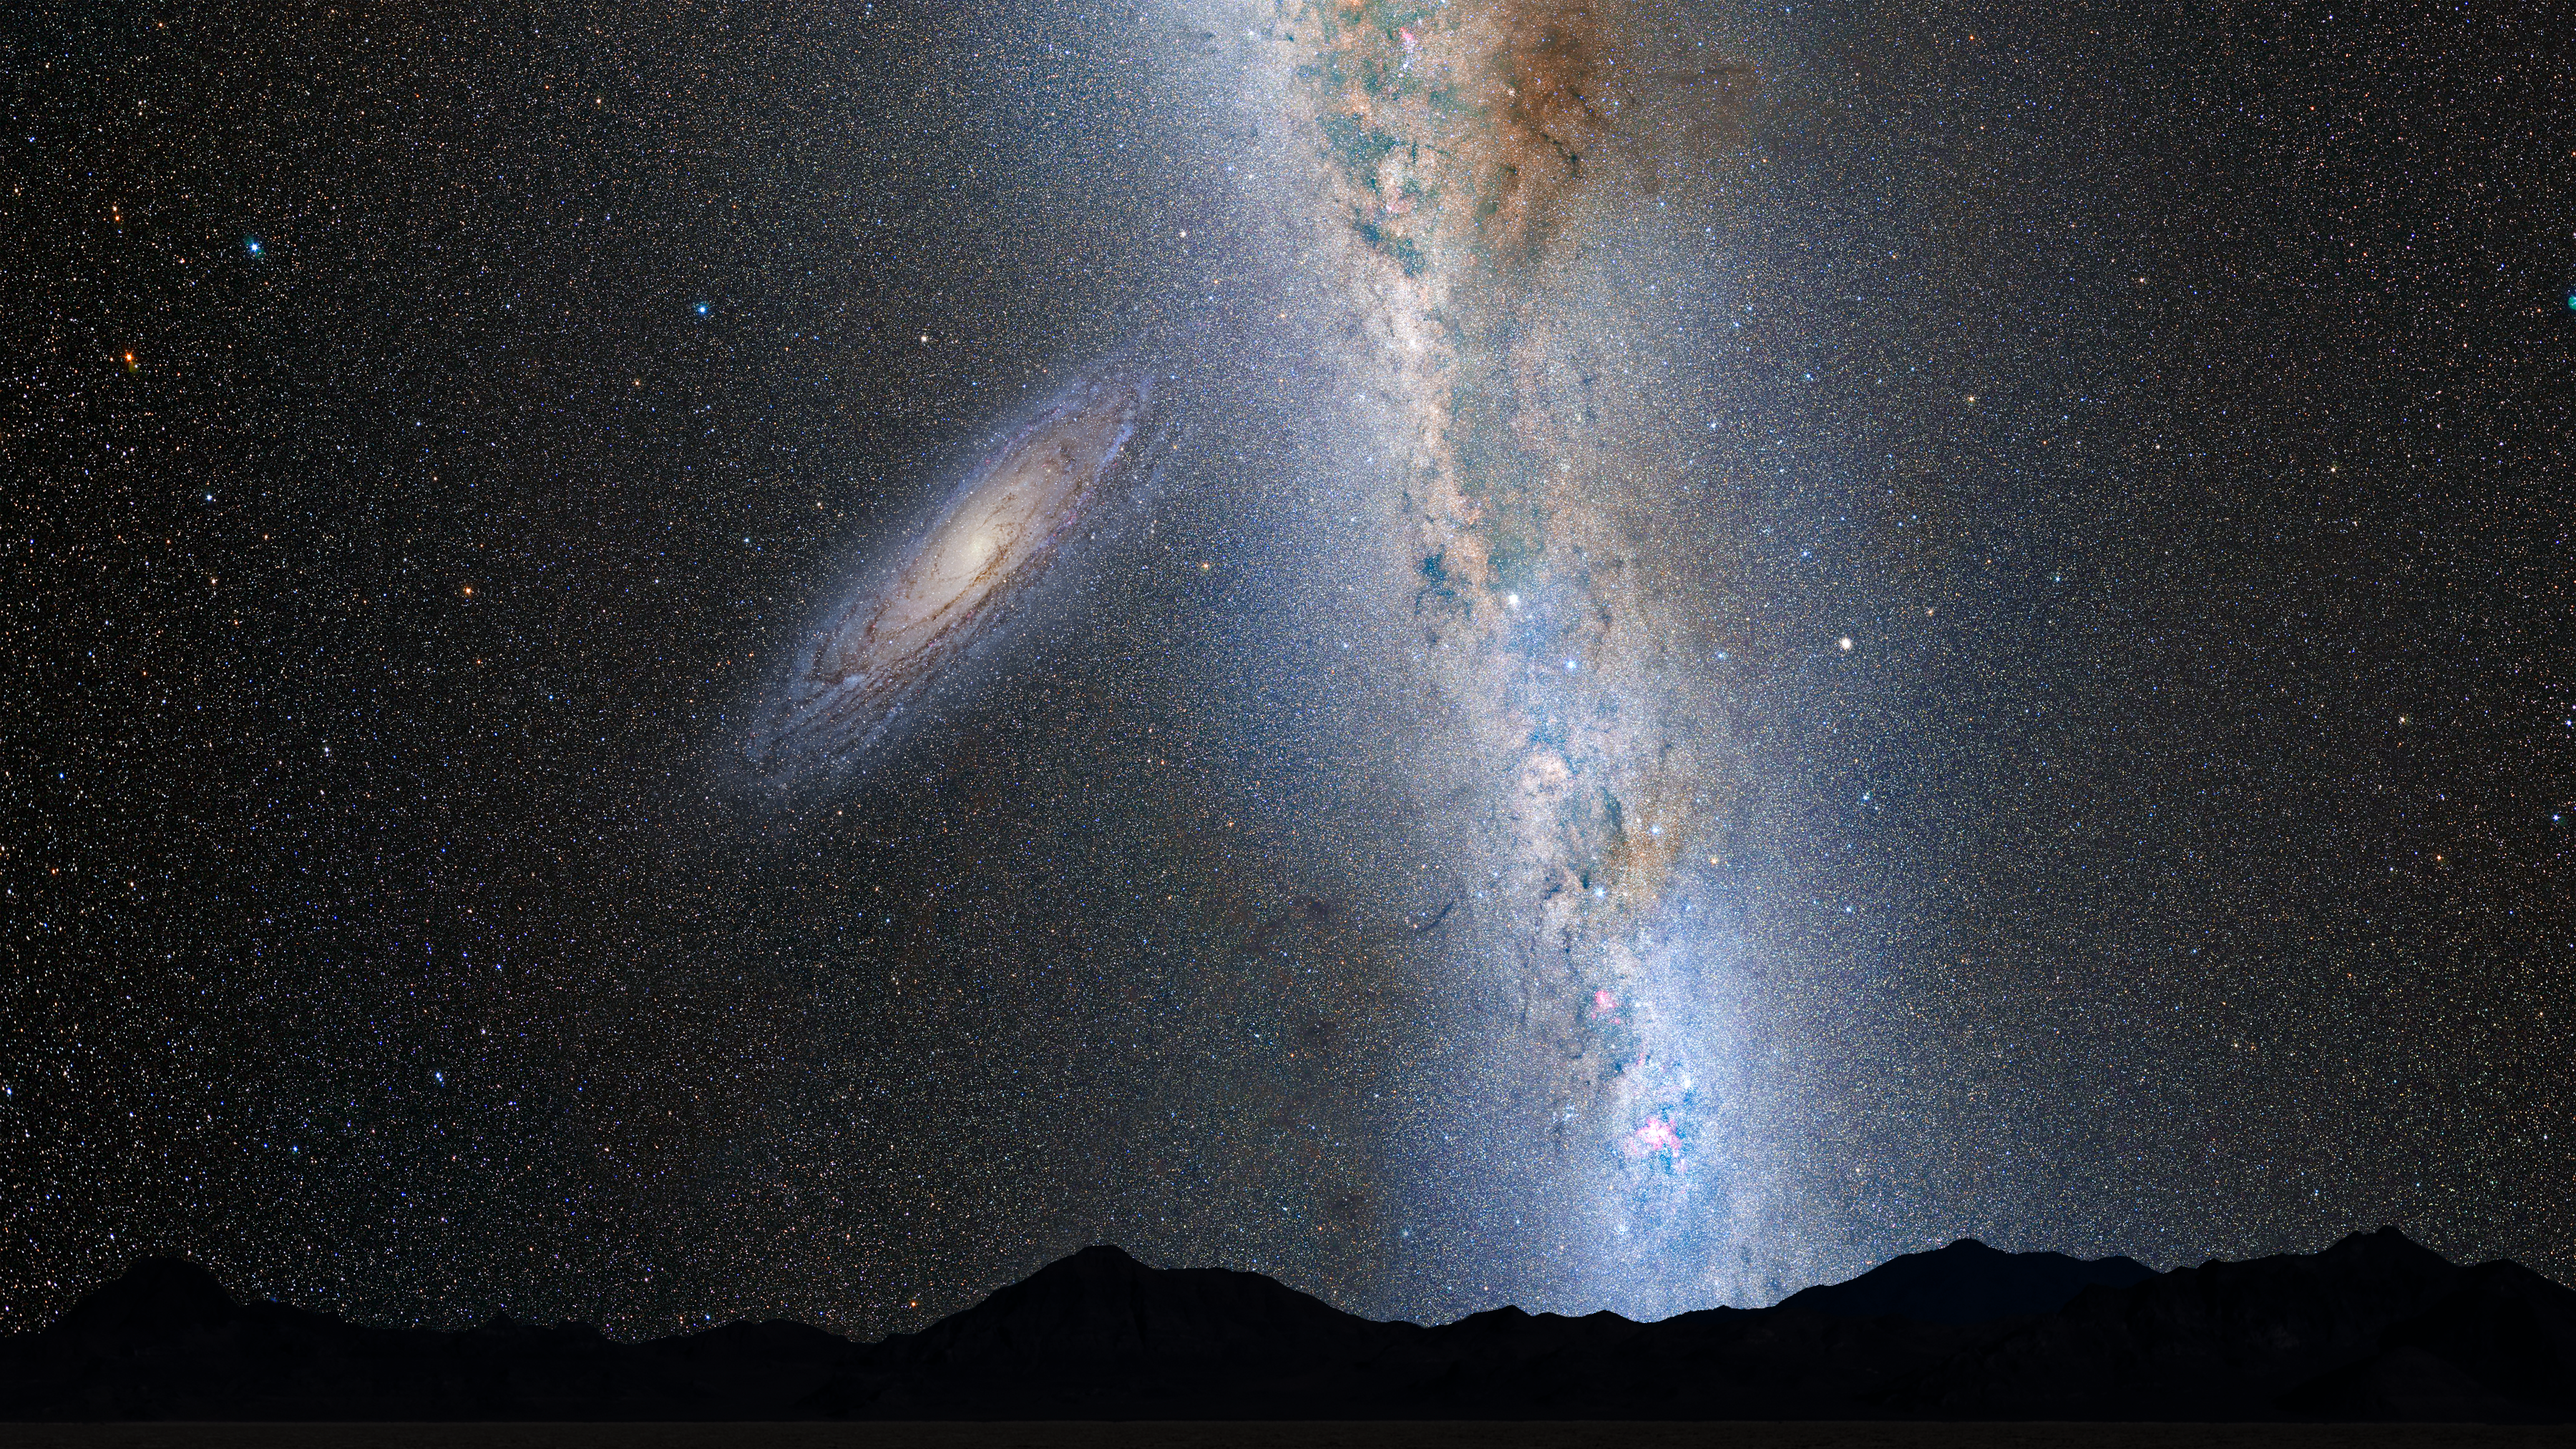

Nighttime Sky View of Future Galaxy Merger: 2 Billion Years

The disk of the approaching Andromeda galaxy is noticeably larger.

Credit: NASA, ESA, Z. Levay and R. van der Marel (STScI), T. Hallas, and A. Mellinger